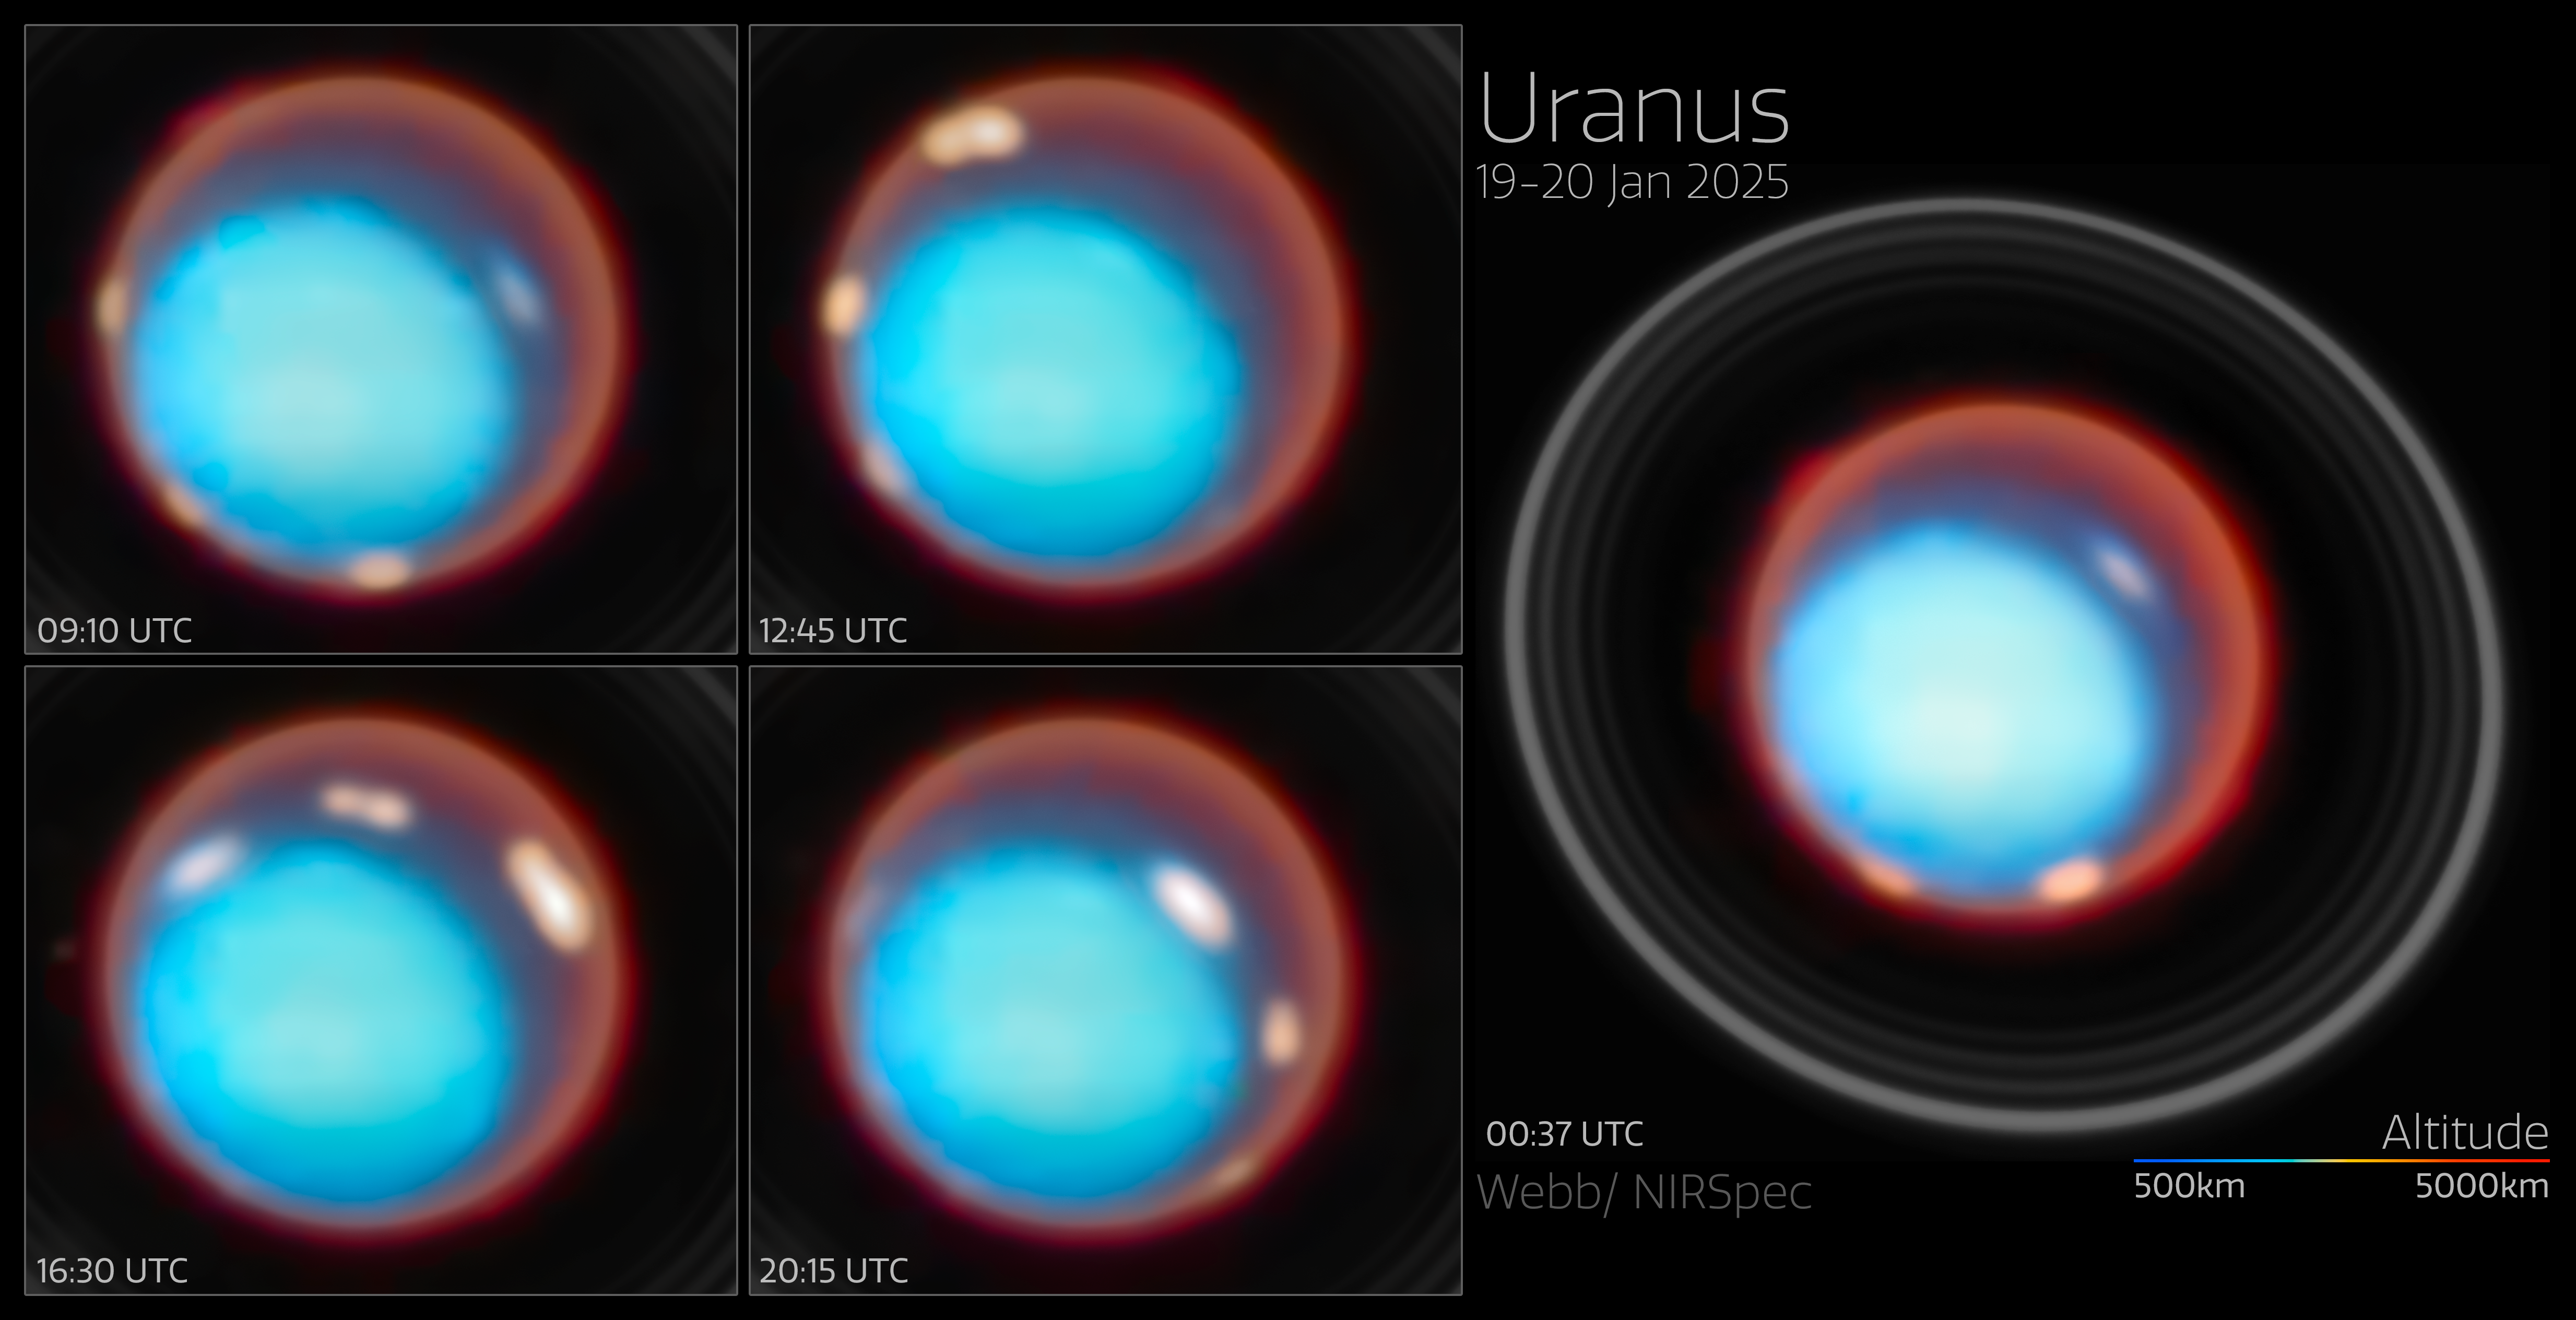

Uranus collage (January 2025, annotated)

For the first time, an international team of astronomers have mapped the vertical structure of Uranus’s upper atmosphere, uncovering how temperature and charged particles vary with height across the planet. Using Webb’s NIRSpec instrument, the team detected the faint glow from molecules high above the clouds. These unique data provide the most detailed portrait yet of where the planet’s auroras form, how they are influenced by its unusually tilted magnetic field, and how Uranus’s atmosphere has continued to cool over the past three decades. The results offer a new window into how ice-giant planets distribute energy in their upper layers.

Two bright auroral bands were detected near Uranus’s magnetic poles, together with reduced emission and ion density in part of the region between the two bands (a feature likely linked to transitions in magnetic field lines).

Credit: ESA/Webb, NASA, CSA, STScI, P. Tiranti, H. Melin, M. Zamani (ESA/Webb)